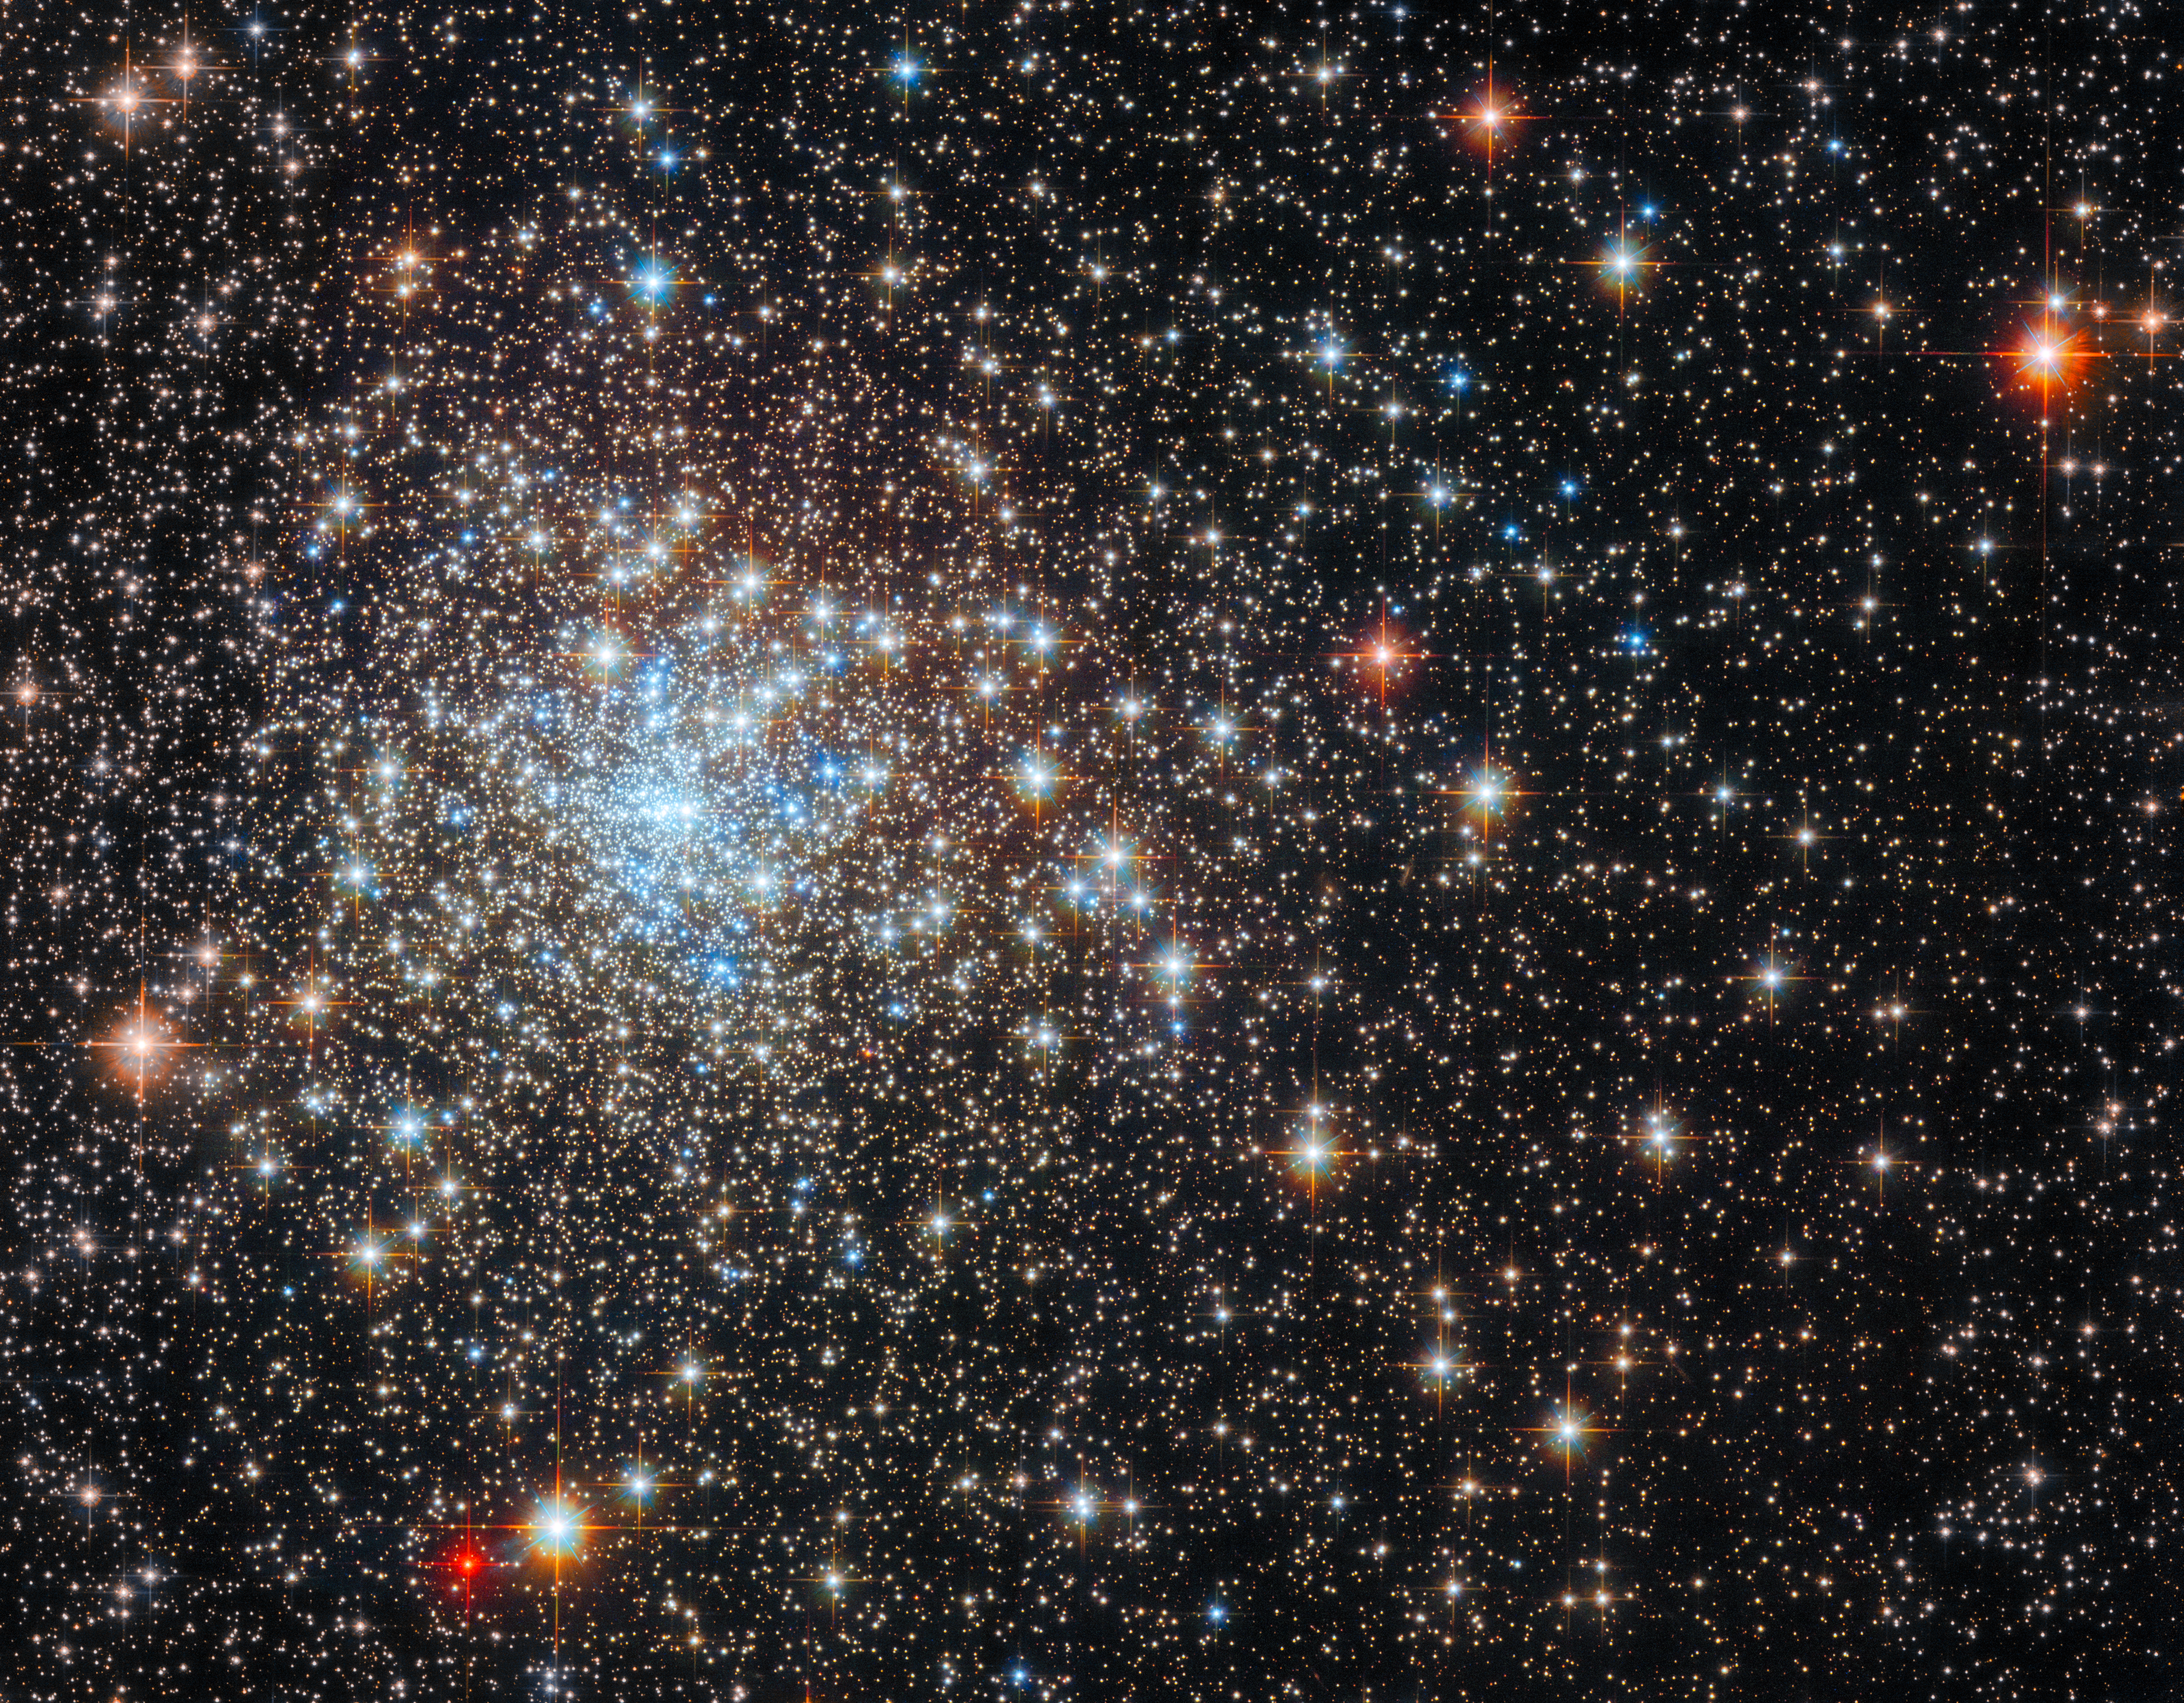

Scrutinising a star-studded cluster

The densely packed globular cluster NGC 6325 glistens in this image from the NASA/ESA Hubble Space Telescope. This concentrated group of stars lies around 26 000 light years from Earth in the constellation Ophiuchus.

Globular clusters like NGC 6325 are tightly bound collections of stars with anywhere from tens of thousands to millions of members. They can be found in all types of galaxies, and act as natural laboratories for astronomers studying star formation. This is because the constituent stars of globular clusters tend to form at roughly the same time and with similar initial composition, meaning that astronomers can use them to fine-tune their theories of how stars evolve.

Astronomers inspected this particular cluster not to understand star formation, but to search for a hidden monster. Though it might look peaceful, astronomers suspect this cluster could contain an intermediate-mass black hole that is subtly affecting the motion of surrounding stars. Previous research found that the distribution of stars in some highly concentrated globular clusters — those with stars packed relatively tightly together — was slightly different from what astronomers expected.

This discrepancy suggested that at least some of these densely packed globular clusters — including perhaps NGC 6325 — could have a black hole lurking at the centre. To explore this hypothesis further, astronomers turned to Hubble’s Wide Field Camera 3 to observe a larger sample of densely populated globular clusters, which included this star-studded image of NGC 6325. Additional data from Hubble’s Advanced Camera for Surveys were also incorporated into this image.

Credit: ESA/Hubble & NASA, E. Noyola, R. Cohen